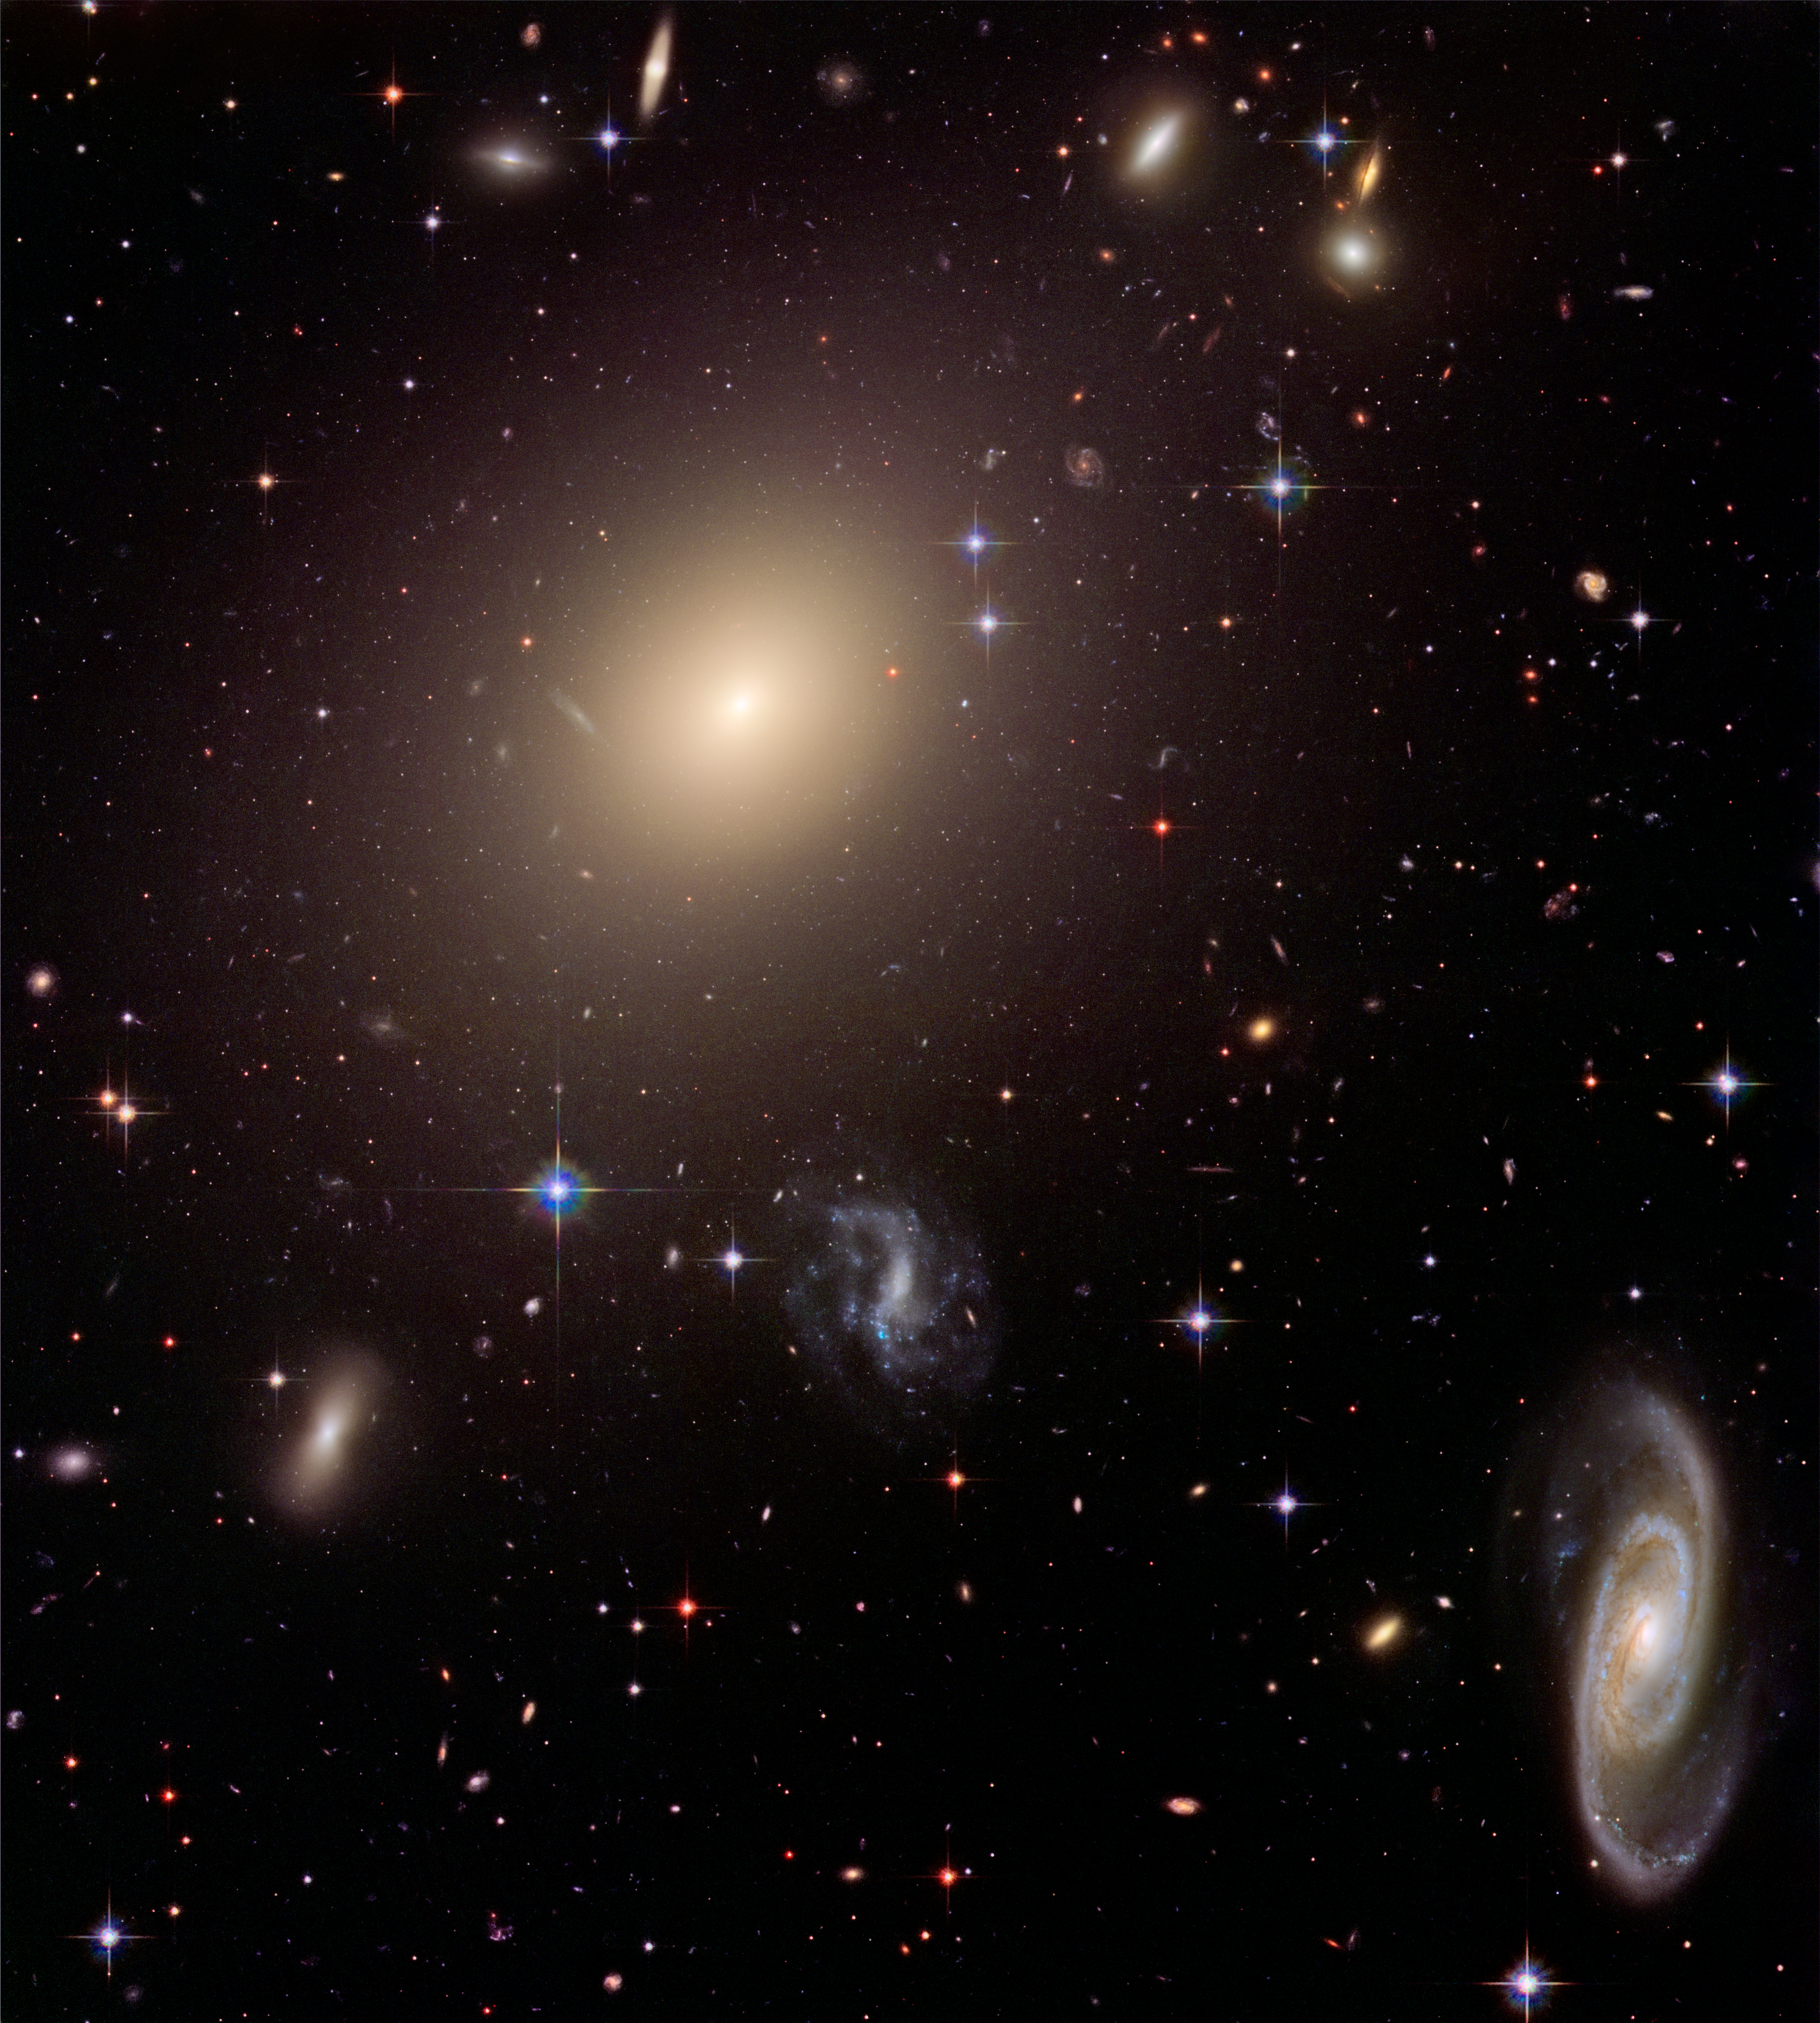

Hubble illuminates cluster of diverse galaxies

This image from the NASA/ESA Hubble Space Telescope shows the diverse collection of galaxies in the cluster Abell S0740 that is over 450 million light-years away in the direction of the constellation Centaurus. The giant elliptical ESO 325-G004 looms large at the cluster's centre. Hubble resolves thousands of globular star clusters orbiting ESO 325-G004. Globular clusters are compact groups of hundreds of thousands of stars that are gravitationally bound together. At the galaxy's distance they appear as pinpoints of light contained within the diffuse halo. This image was created by combining Hubble science observations taken in January 2005 with Hubble Heritage observations taken a year later to form a 3-colour composite. The filters that isolate blue, red and infrared light were used with the Advanced Camera for Surveys aboard Hubble.

Credit: NASA, ESA, and The Hubble Heritage Team (STScI/AURA)